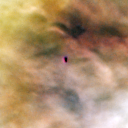

165-254

One of 42 new proplyds discovered in the Orion Nebula, 294-606 is one of the dark proplyds that lies relatively far from the nebula’s brightest star, Theta 1 Orionis C.

Credit: NASA/ESA and L. Ricci (ESO)